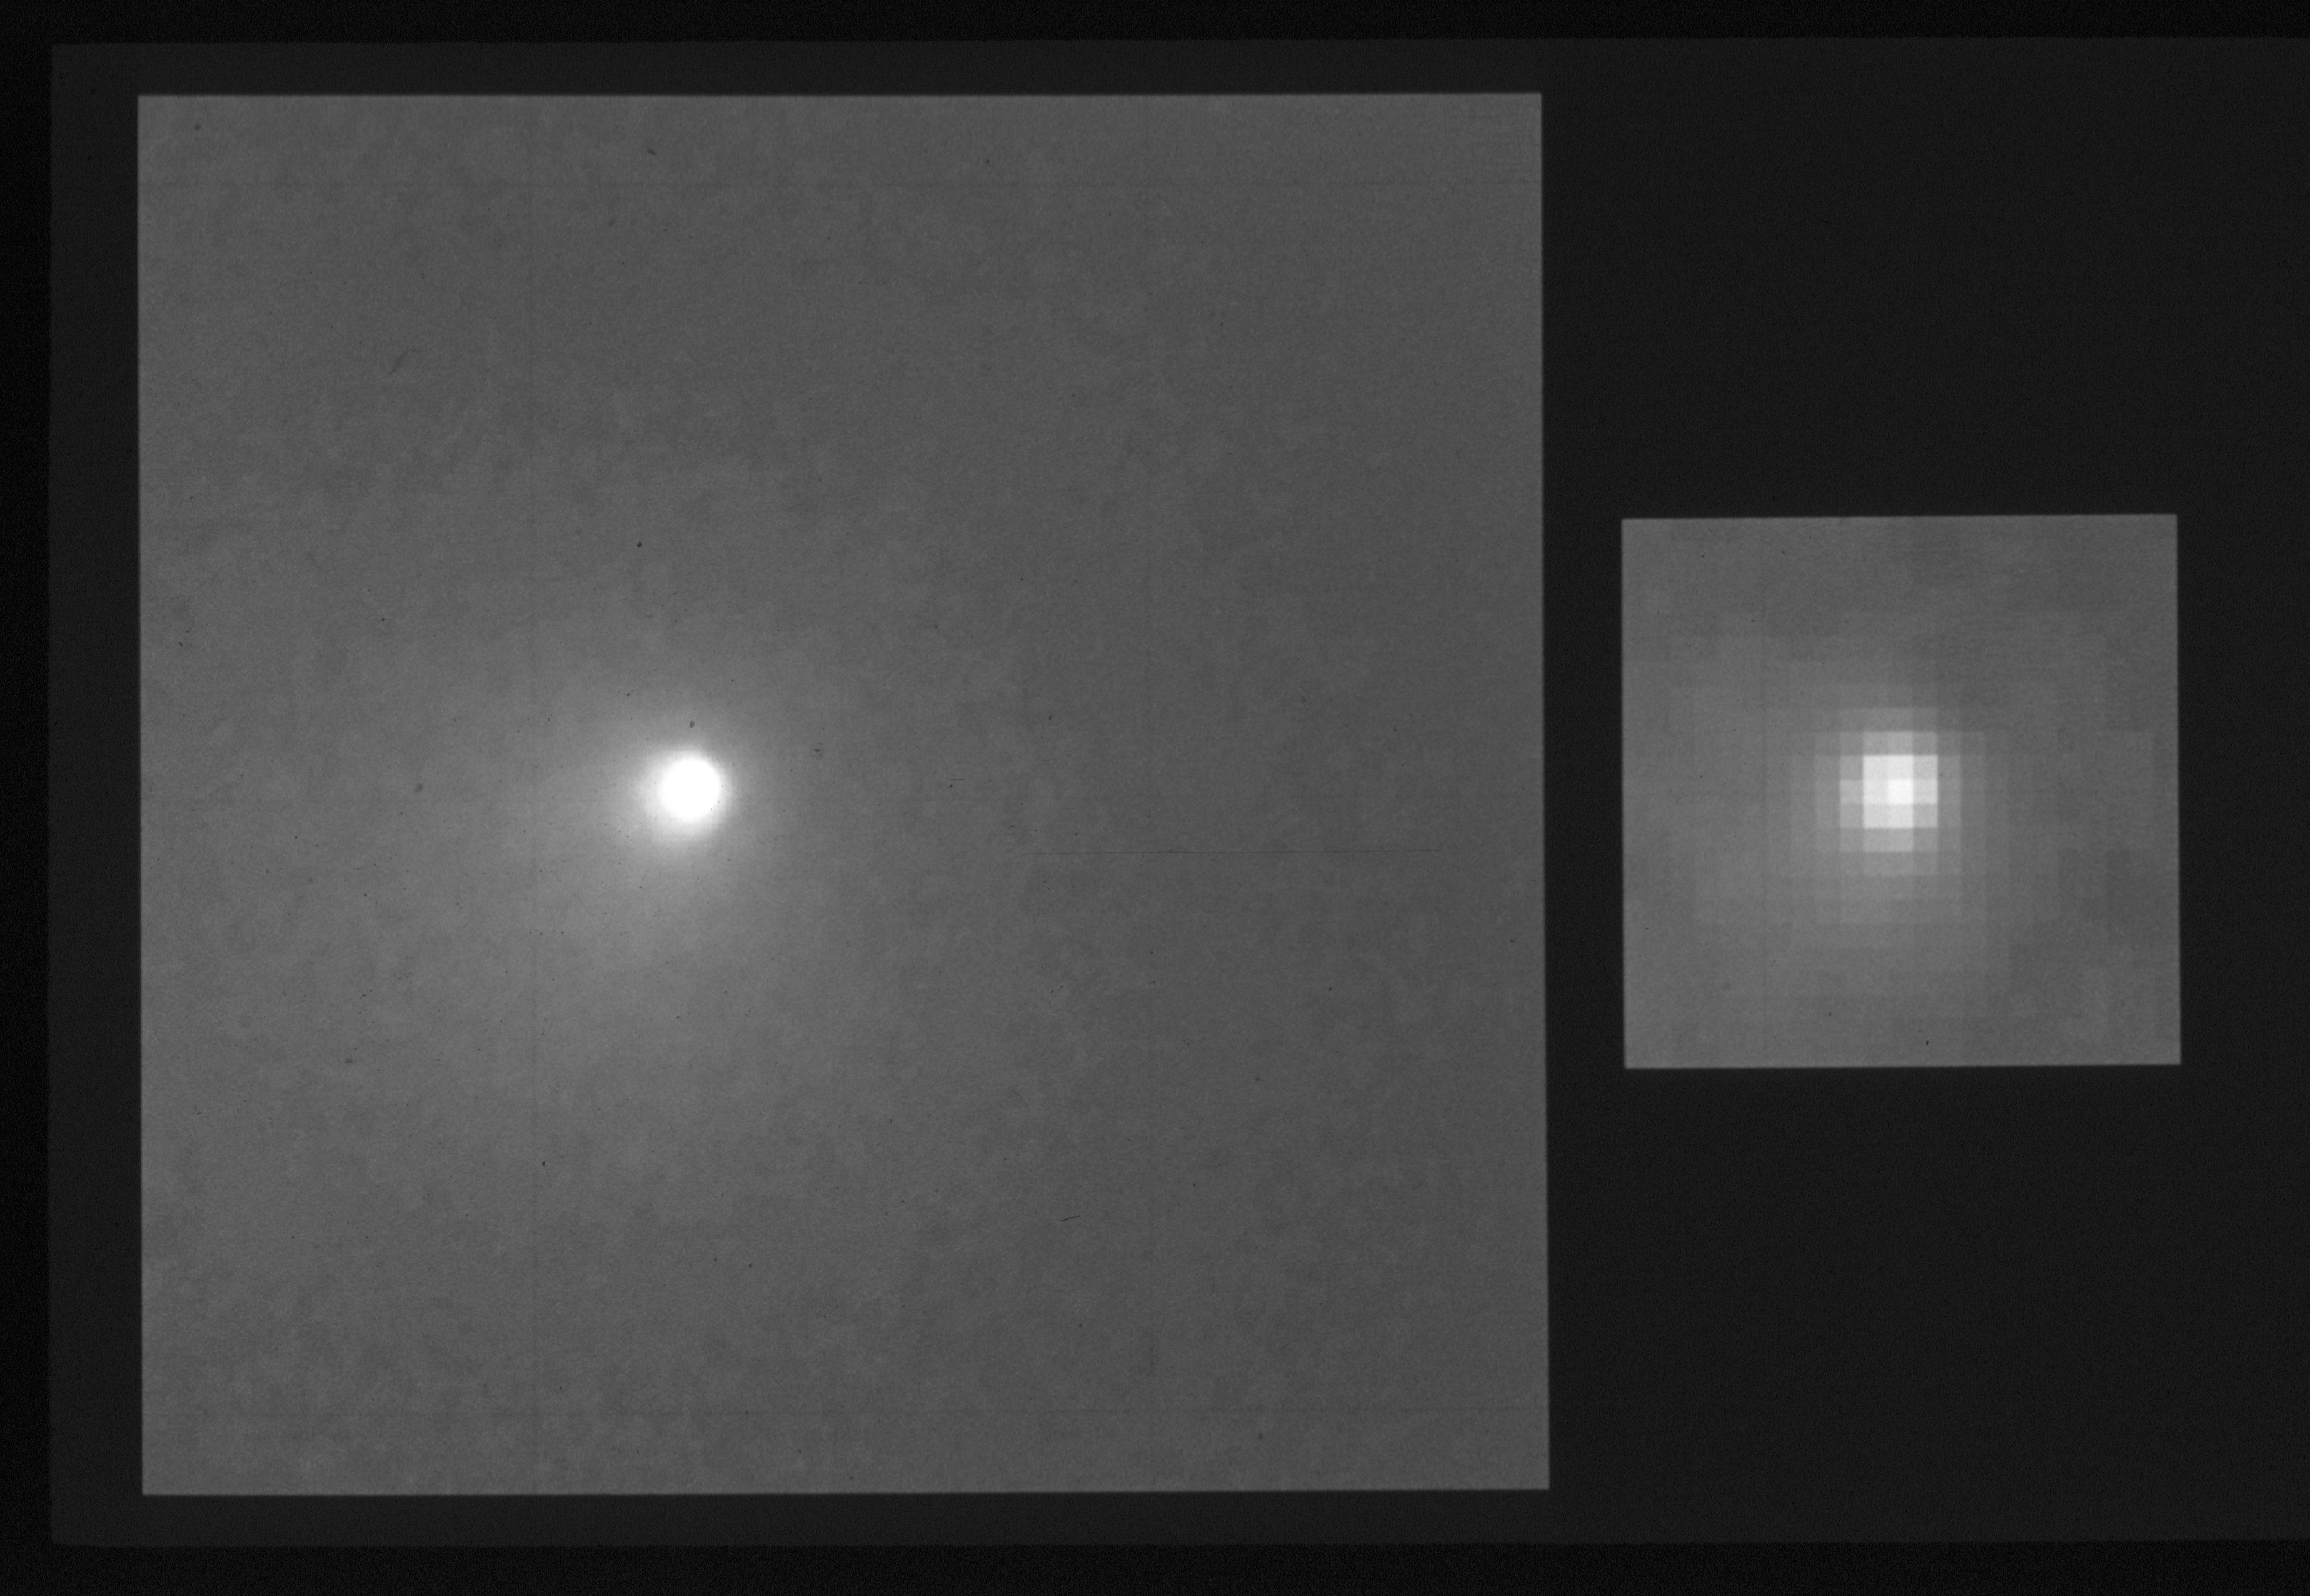

Comet levy

NASA/ESA Hubble Space Telescope has observed the inner core surrounding the icy nucleus of Comet Levy more clearly than can be done with ground-based telescopes

The image was taken September 27th with the HST's Wide Field and PlanetaryCamera, when the comet was at a distance of about 160,000,000 kilometers (100,000,000 miles) from Earth.

Credit: NASA/ESA